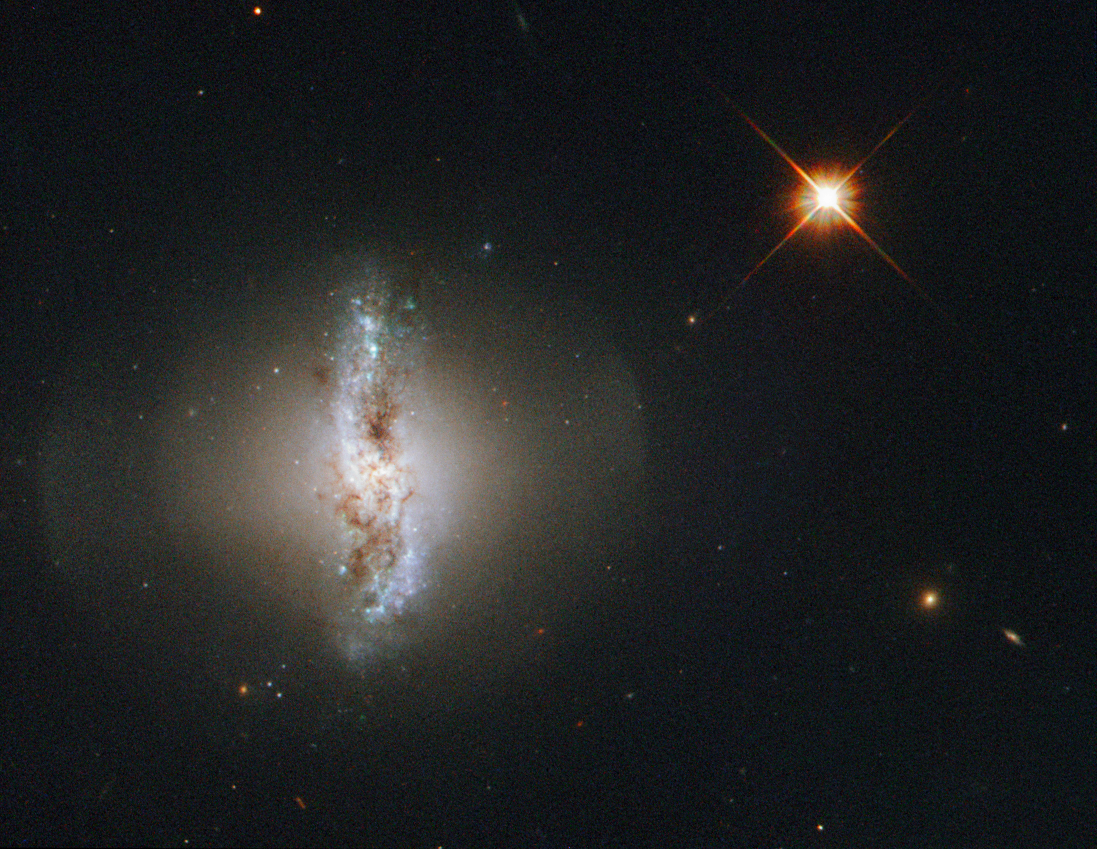

The polar ring of Arp 230

This Picture of the Week shows Arp 230, also known as IC 51, observed by the NASA/ESA Hubble Space Telescope.

Arp 230 is a galaxy of an uncommon or peculiar shape, and is therefore part of the Atlas of Peculiar Galaxies produced by Halton Arp. Its irregular shape is thought to be the result of a violent collision with another galaxy sometime in the past. The collision could also be held responsible for the formation of the galaxy’s polar ring.

The outer ring surrounding the galaxy consists of gas and stars and rotates over the poles of the galaxy. It is thought that the orbit of the smaller of the two galaxies that created Arp 230 was perpendicular to the disc of the second, larger galaxy when they collided. In the process of merging the smaller galaxy would have been ripped apart and may have formed the polar ring structure astronomers can observe today.

Arp 230 is quite small for a lenticular galaxy, so the two original galaxies forming it must both have been smaller than the Milky Way.

A version of this image was entered into the Hubble’s Hidden Treasures image processing competition by flickr user Det58.

Credit: ESA/Hubble & NASA Acknowledgement: Flickr user Det58